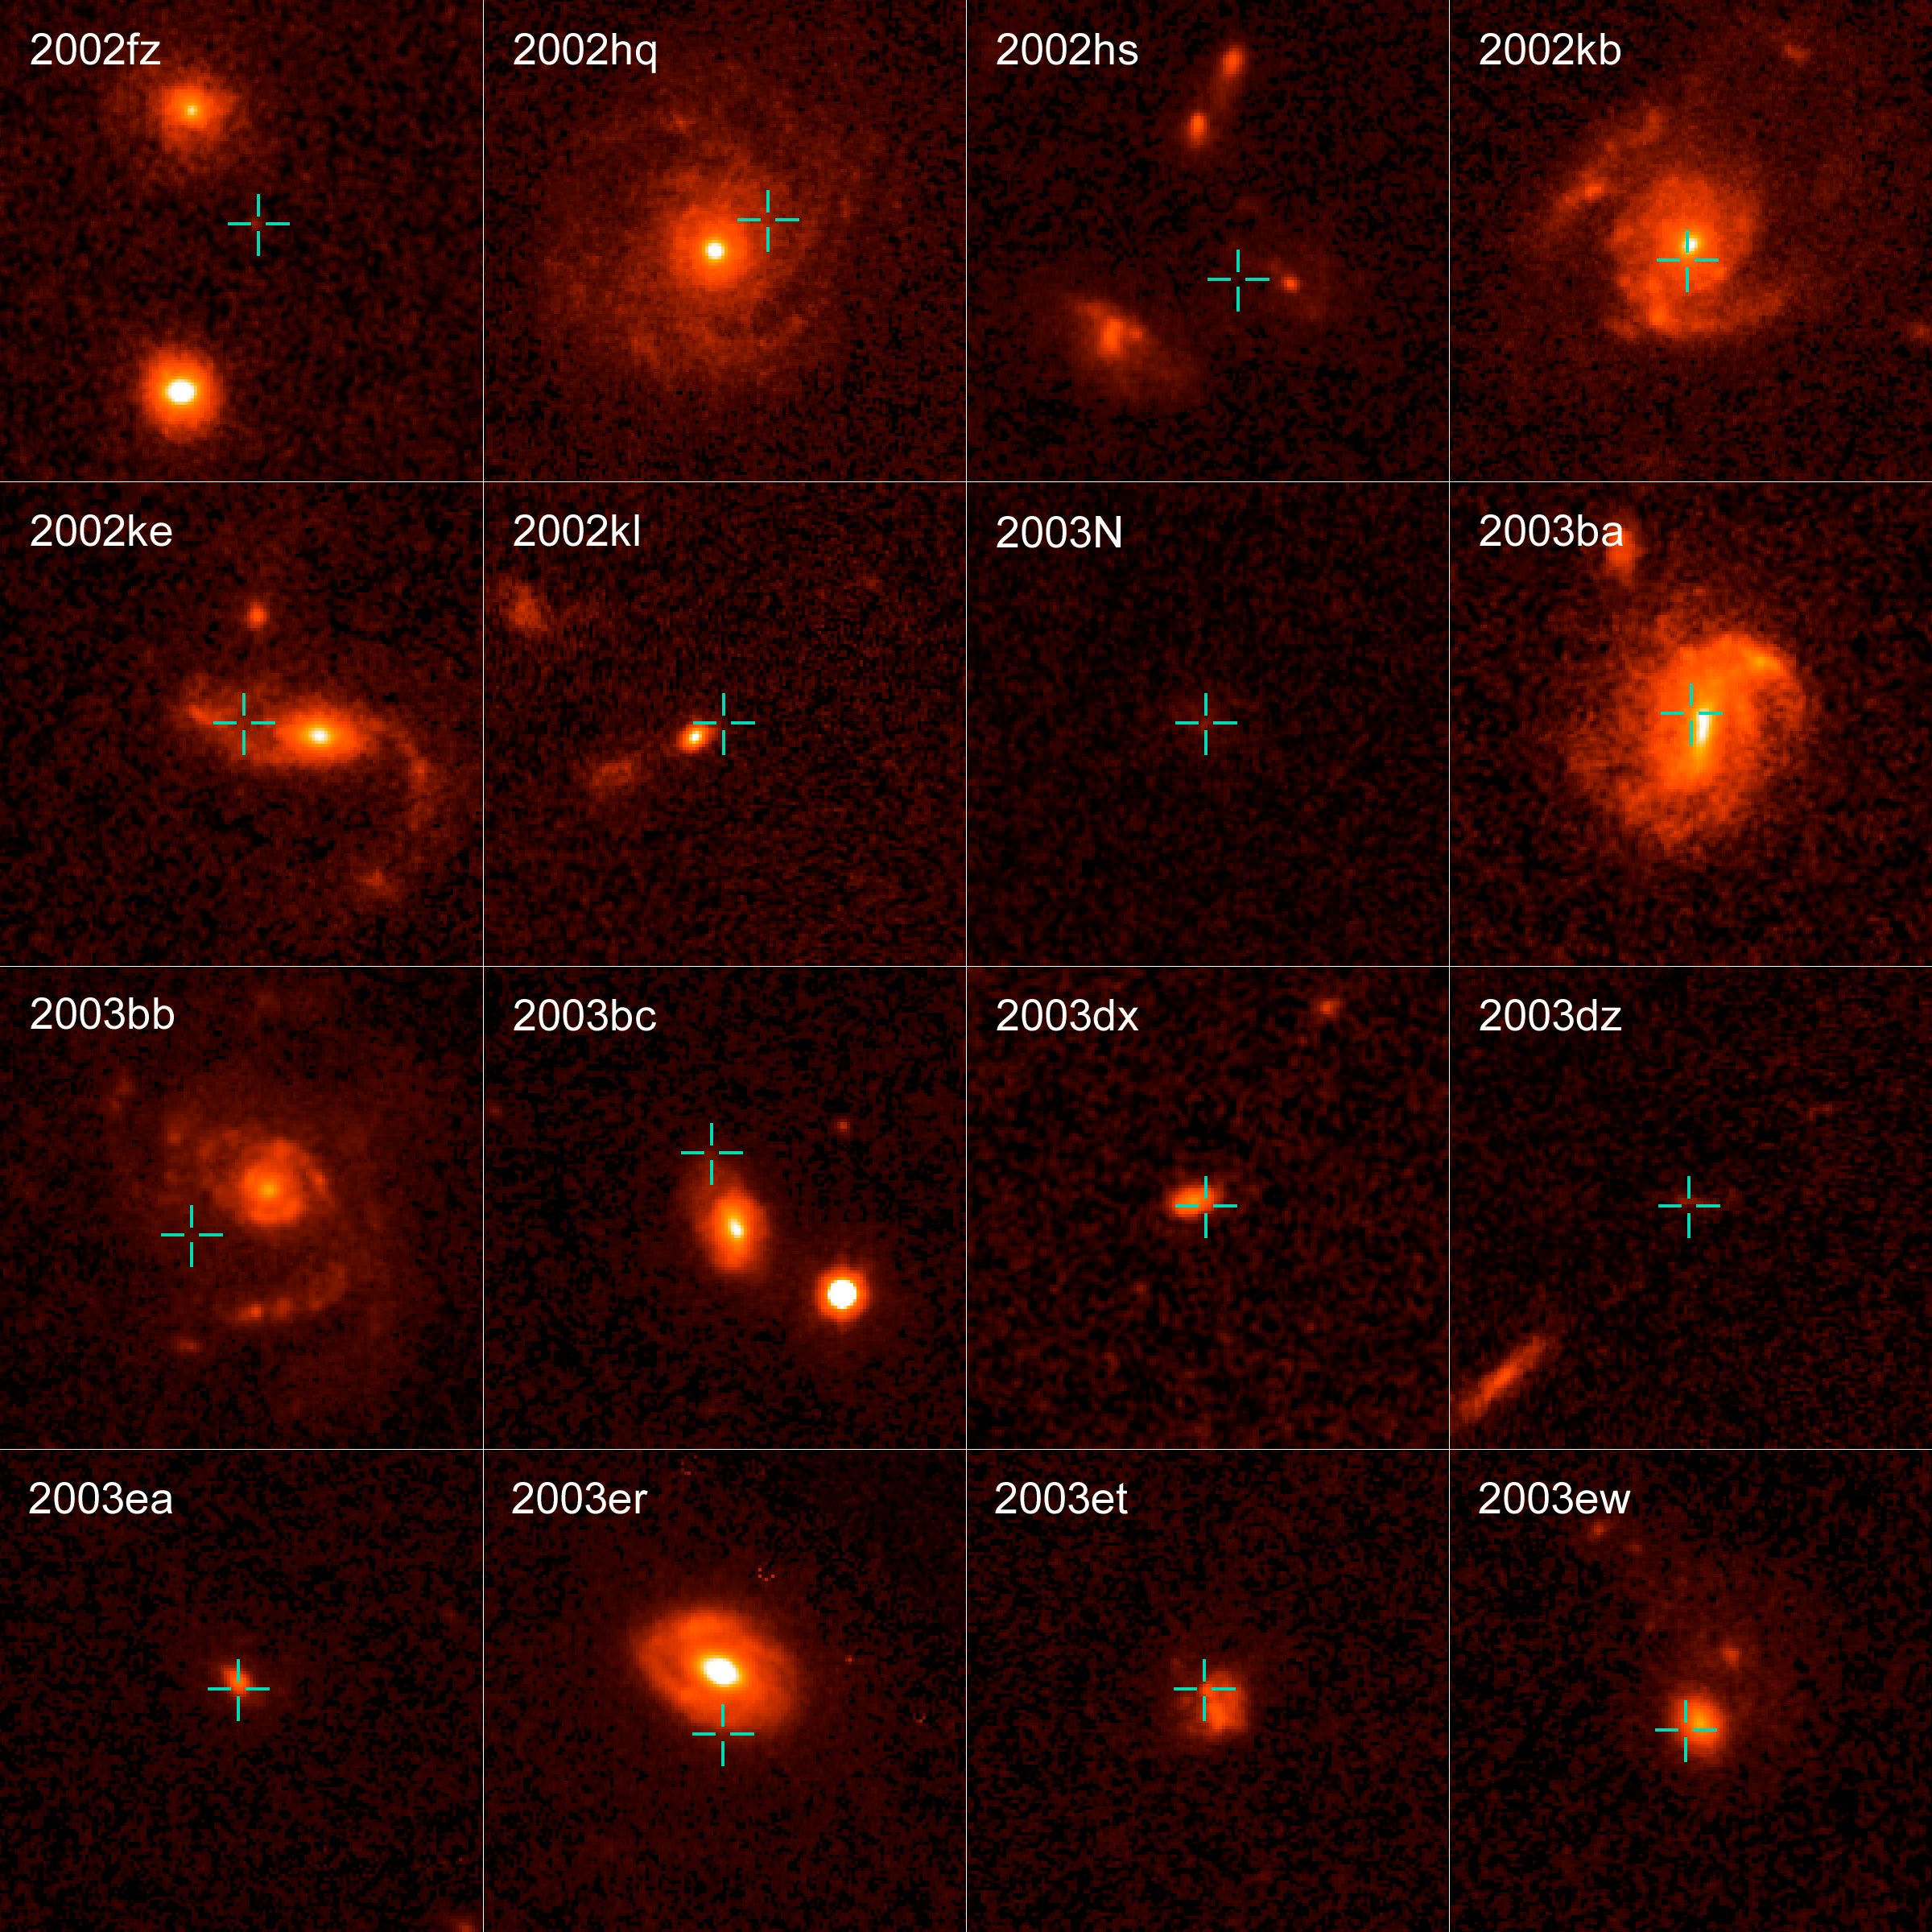

GOODS Supernovae

Supernovae are extremely luminous and cause a burst of radiation that often briefly outshines an entire galaxy, before fading from view over several weeks or months. During this short interval a supernova can radiate as much energy as the Sun is expected to emit over its entire life span.

Credit: ACS